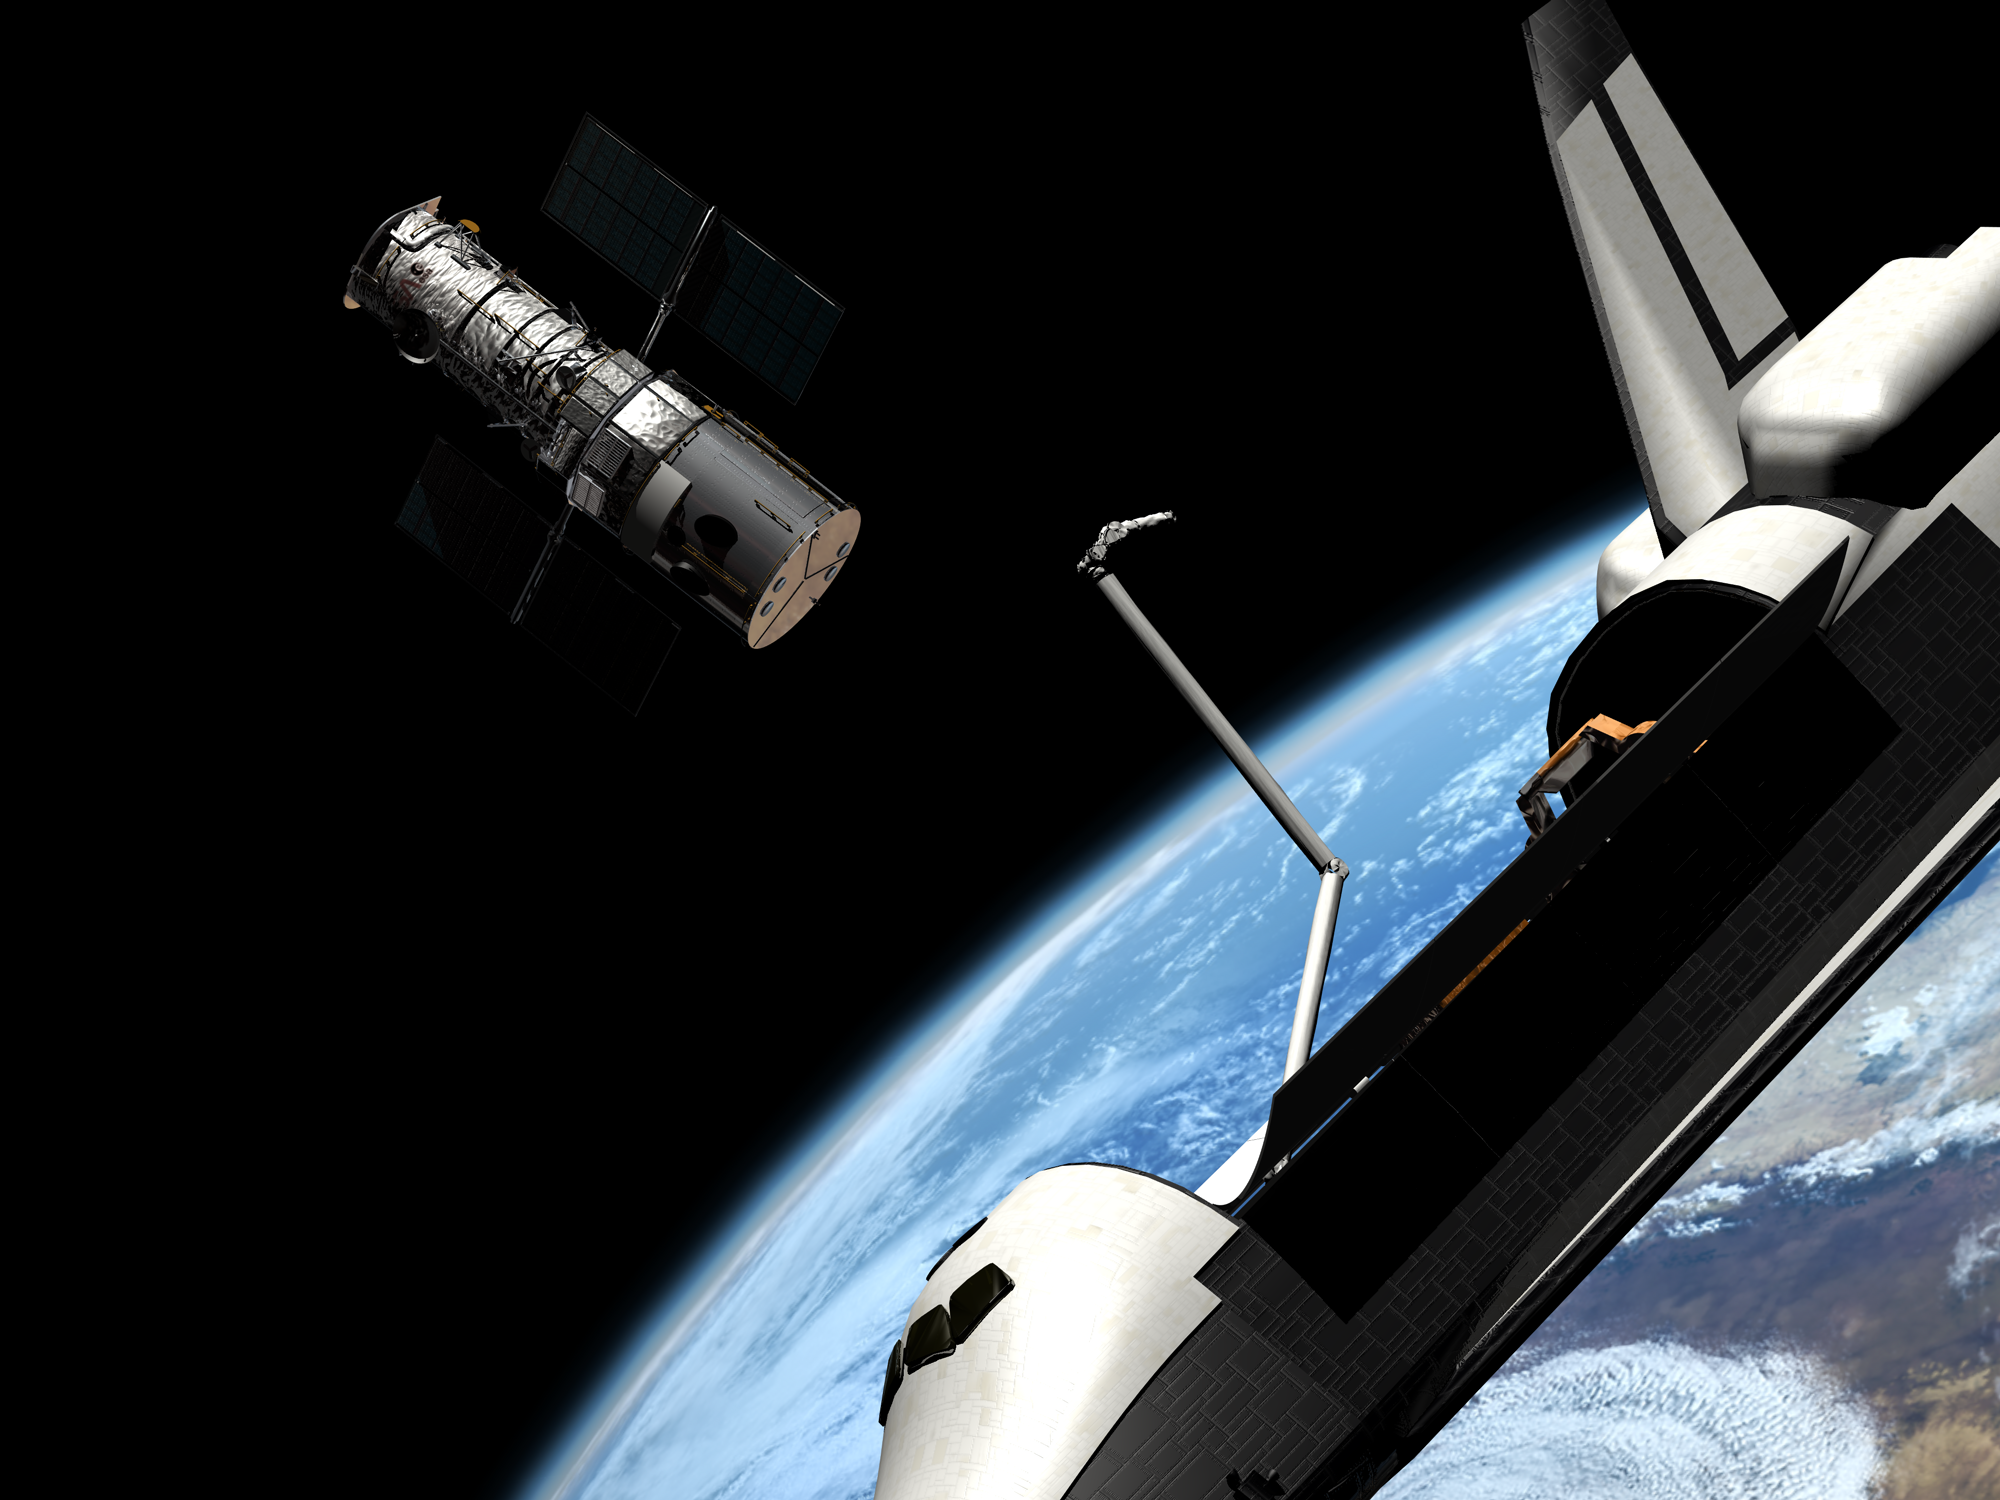

SM3B - Hubble is released

This artist's impression shows Hubble being released at the end of Servicing Mission 3B in 2002.

Credit: European Space Agency